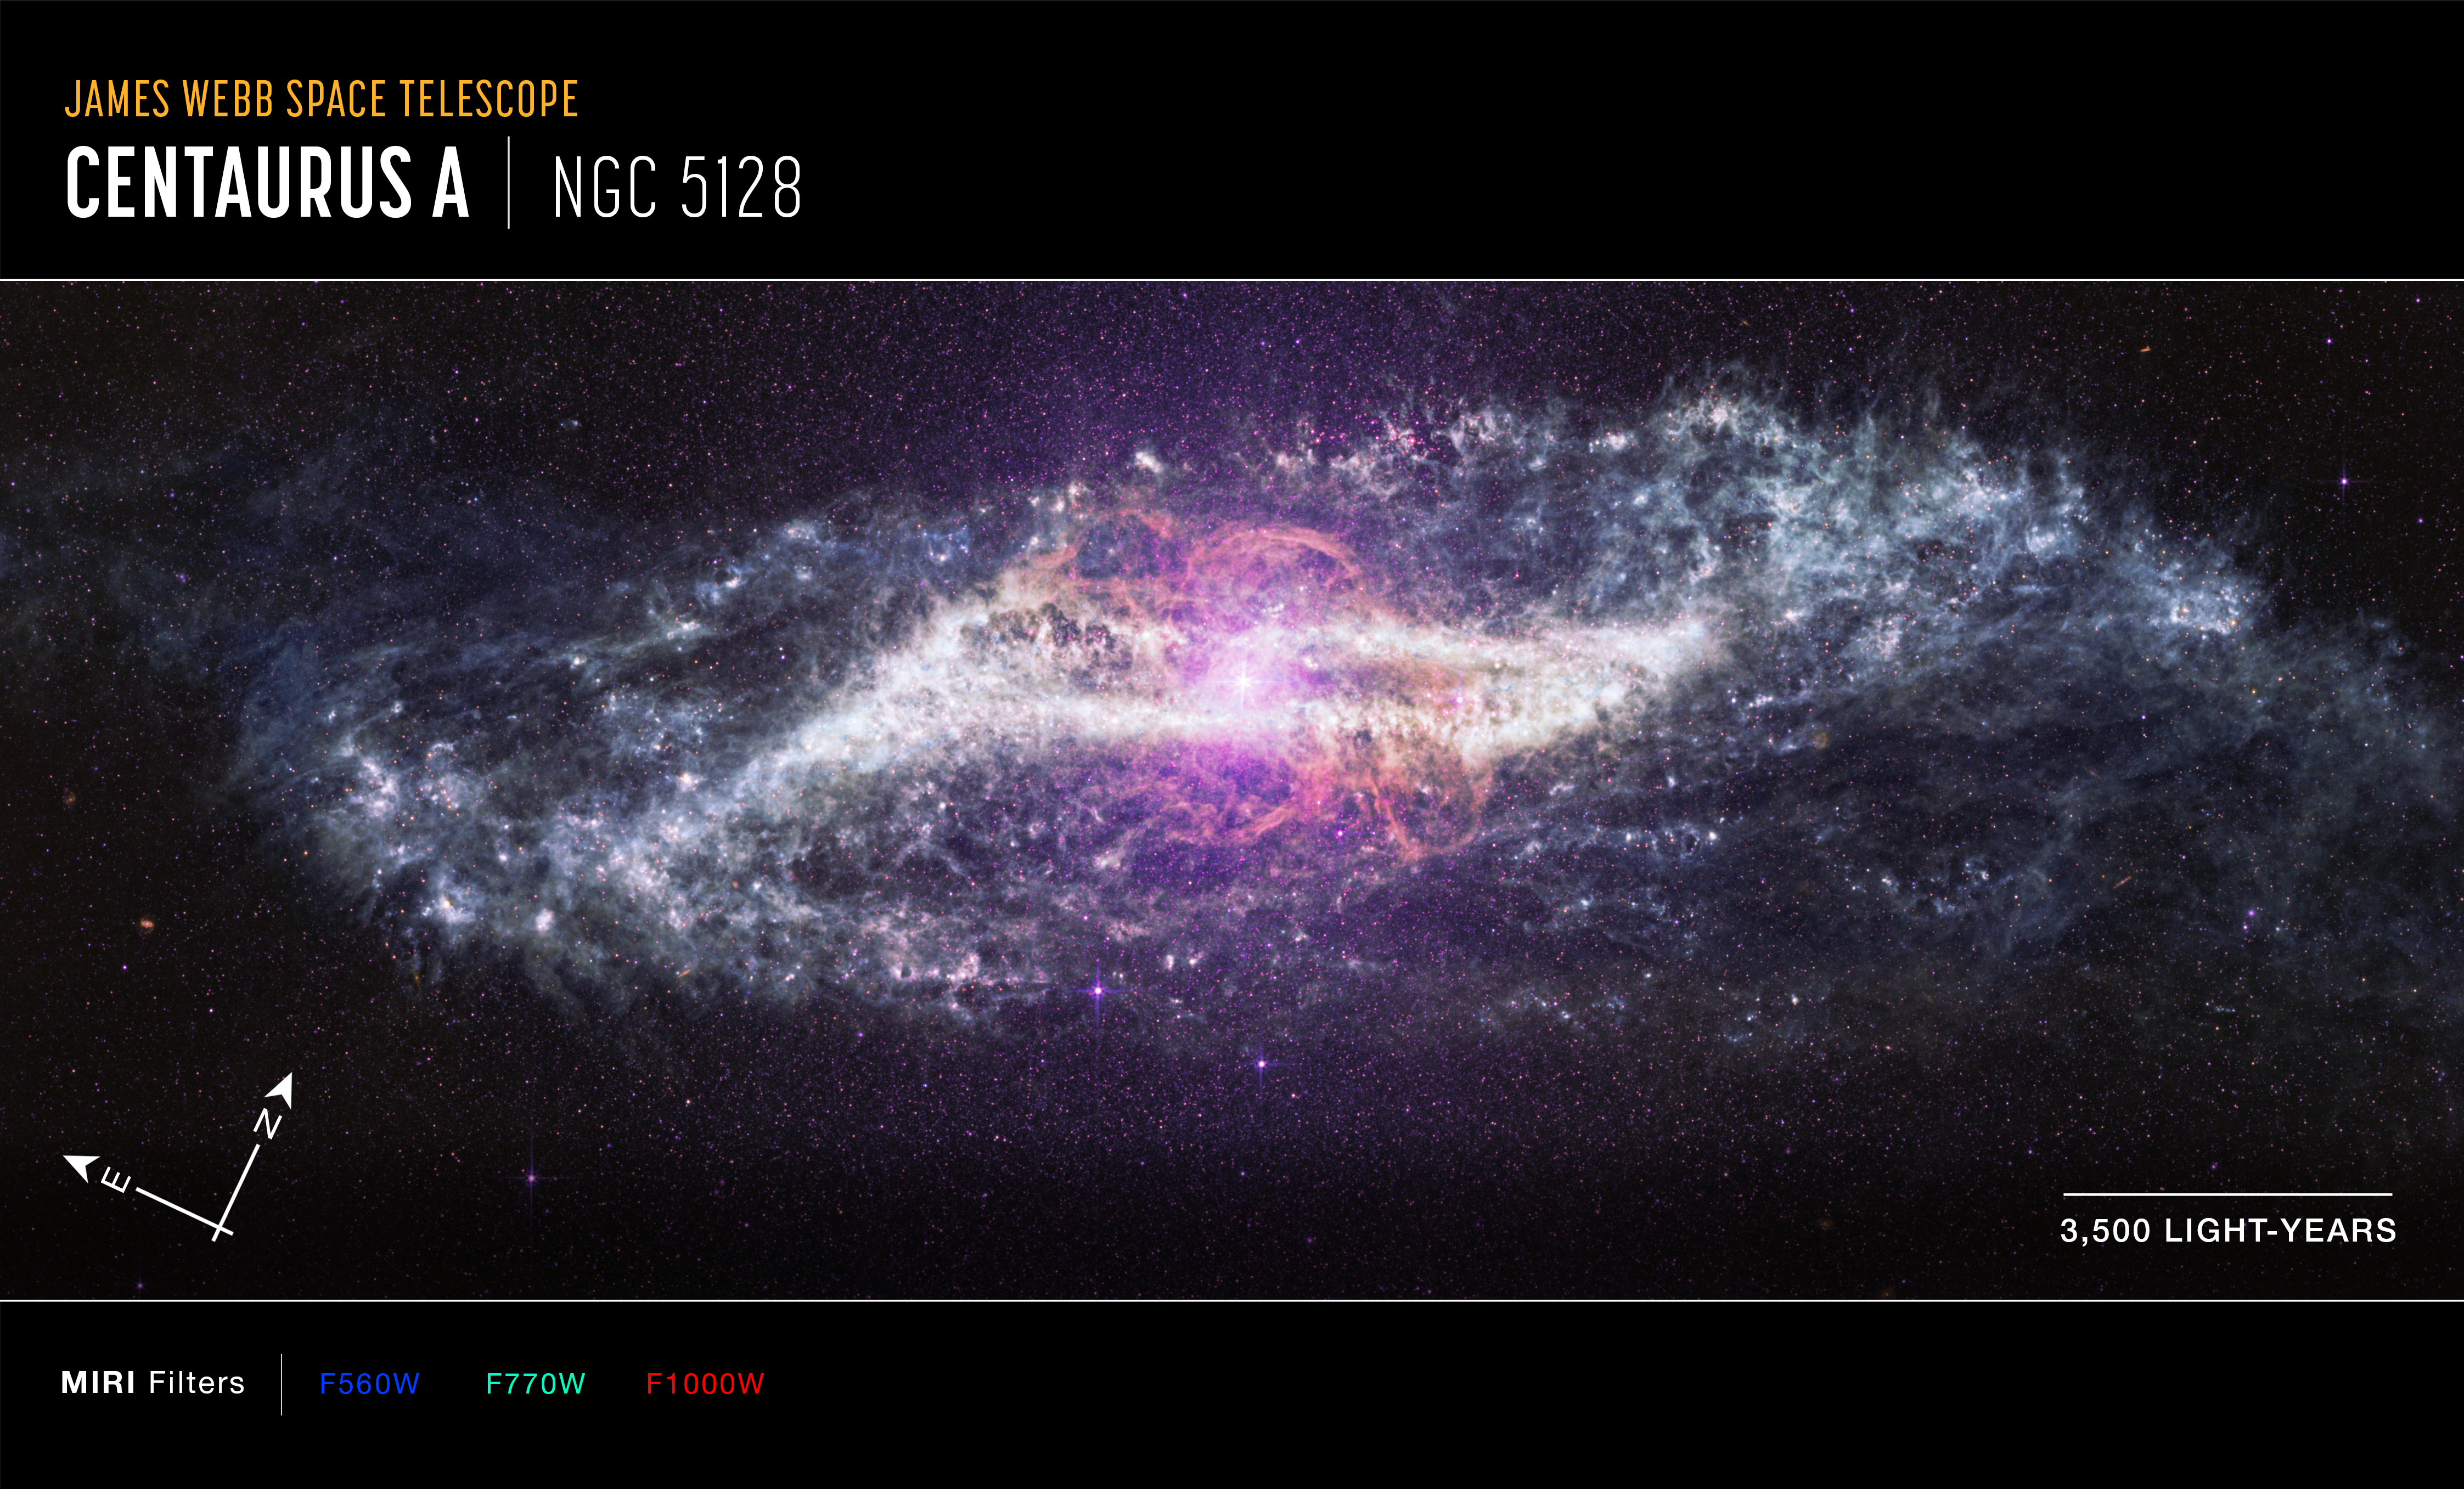

Centaurus A (annotated MIRI image)

Annotated image of the active galaxy Centaurus A captured by the James Webb Space Telescope’s MIRI (Mid-Infrared Instrument), with compass arrows, a scale bar, and colour key for reference.

The north and east compass arrows show the orientation of the image on the sky. Note that the relationship between north and east on the sky (as seen from below) is flipped relative to direction arrows on a map of the ground (as seen from above).

The scale bar is labeled in light-years.

This image shows invisible mid-infrared wavelengths of light that have been translated into visible-light colours. The colour key shows which MIRI filters were used when collecting the light. The colour of each filter name is the visible light colour used to represent the infrared light that passes through that filter.

Credit: NASA, ESA, CSA, STScI. Image Processing: A. Pagan (STScI), J. Depasquale (STScI), M. Garcia Marin (ESA Office at STScI)